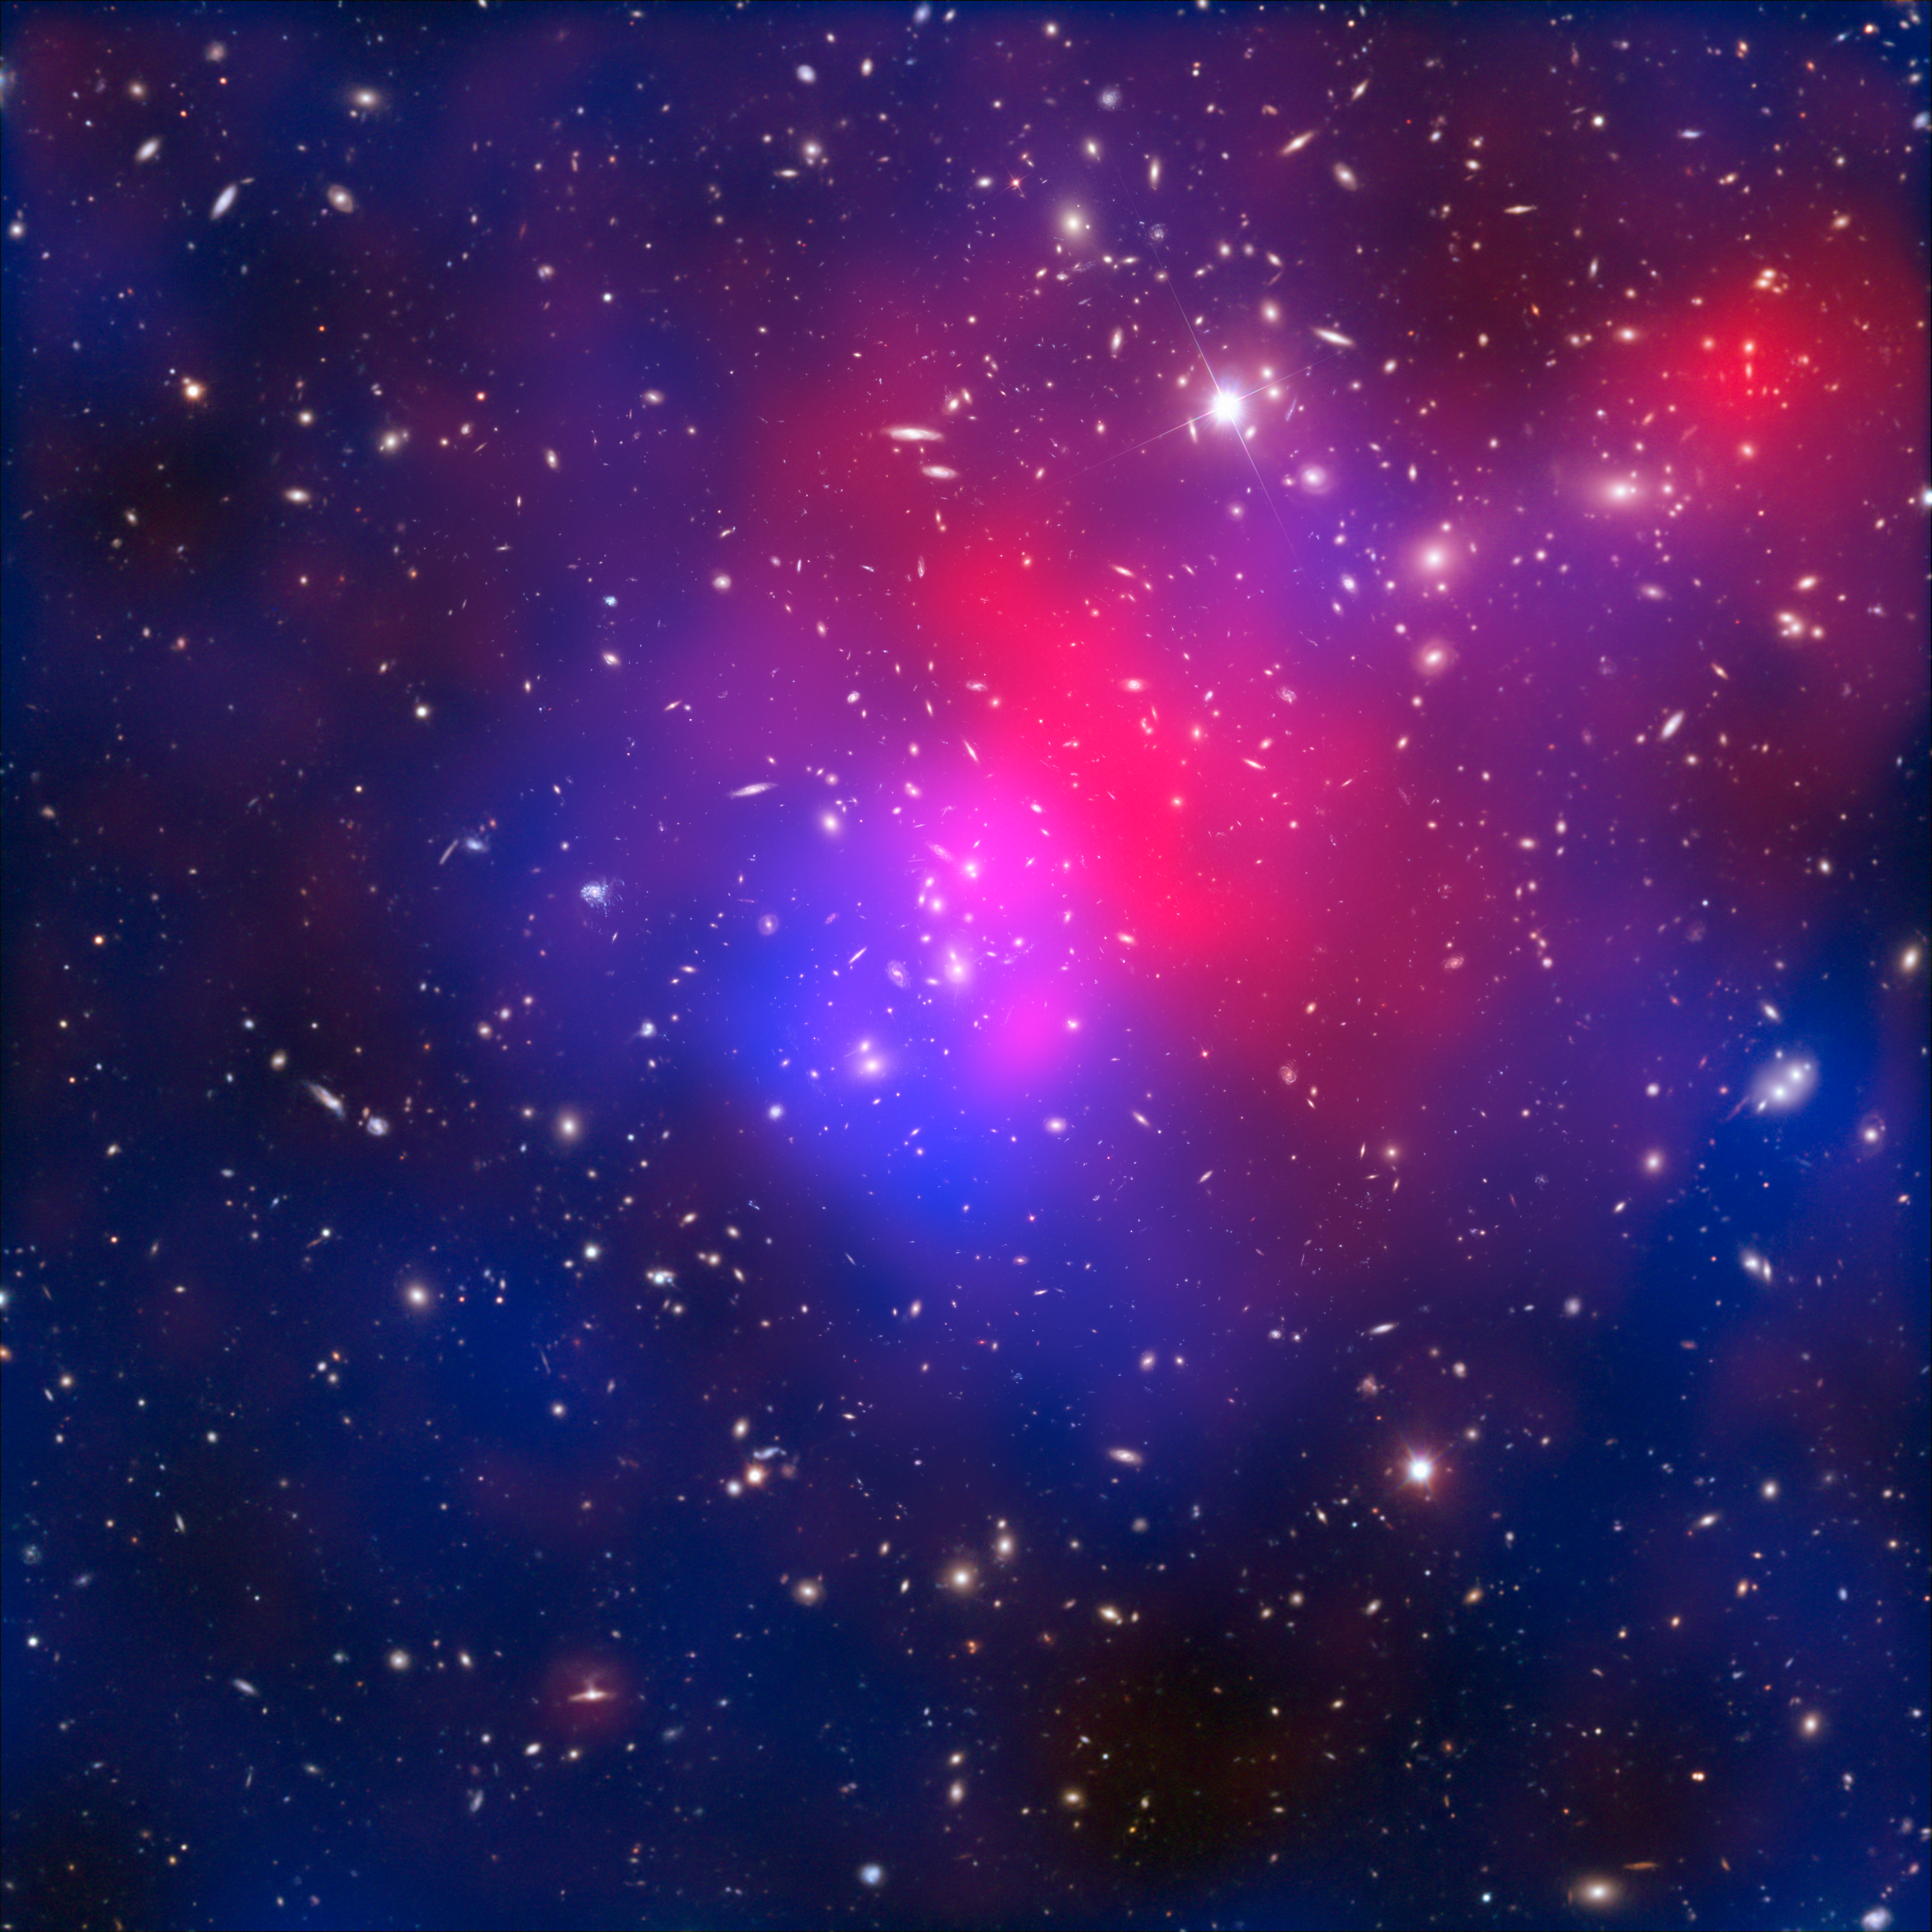

X-rays, dark matter and galaxies in cluster Abell 2744

This image combines visible light exposures of galaxy cluster Abell 2744 taken by the NASA/ESA Hubble Space Telescope and the European Southern Observatory’s Very Large Telescope, with X-ray data from NASA’s Chandra X-ray Observatory and a mathematical reconstruction of the location of dark matter.

The galaxies in the cluster, while they are the only part that is visible in the optical part of the spectrum, actually only provide around 5% of the mass in the cluster.

Hot intracluster gas (shown in pink) is visible through its X-ray emissions, observed by NASA’s Chandra satellite.

The blue overlay shows a map of the mass in the cluster. This is reconstructed based on detailed analysis of the way that the cluster bends light from galaxies in the distant background. Evidence of this light bending can be seen in arc-like distortions in parts of this image. Since dark matter makes up the lion’s share of mass in the cluster — around 75% — this blue overlay reveals the location of the otherwise invisible dark matter.

Analysis of this data has allowed scientists to observe some strange phenomena in Abell 2744, including a pocket of dark matter with no gas or galaxies, and a clump of galaxies with no associated gas. Astronomers believe that Abell 2744 formed from the simultaneous pile-up of at least four separate clusters.

Credit: NASA, ESA, ESO, CXC, and D. Coe (STScI)/J. Merten (Heidelberg/Bologna)